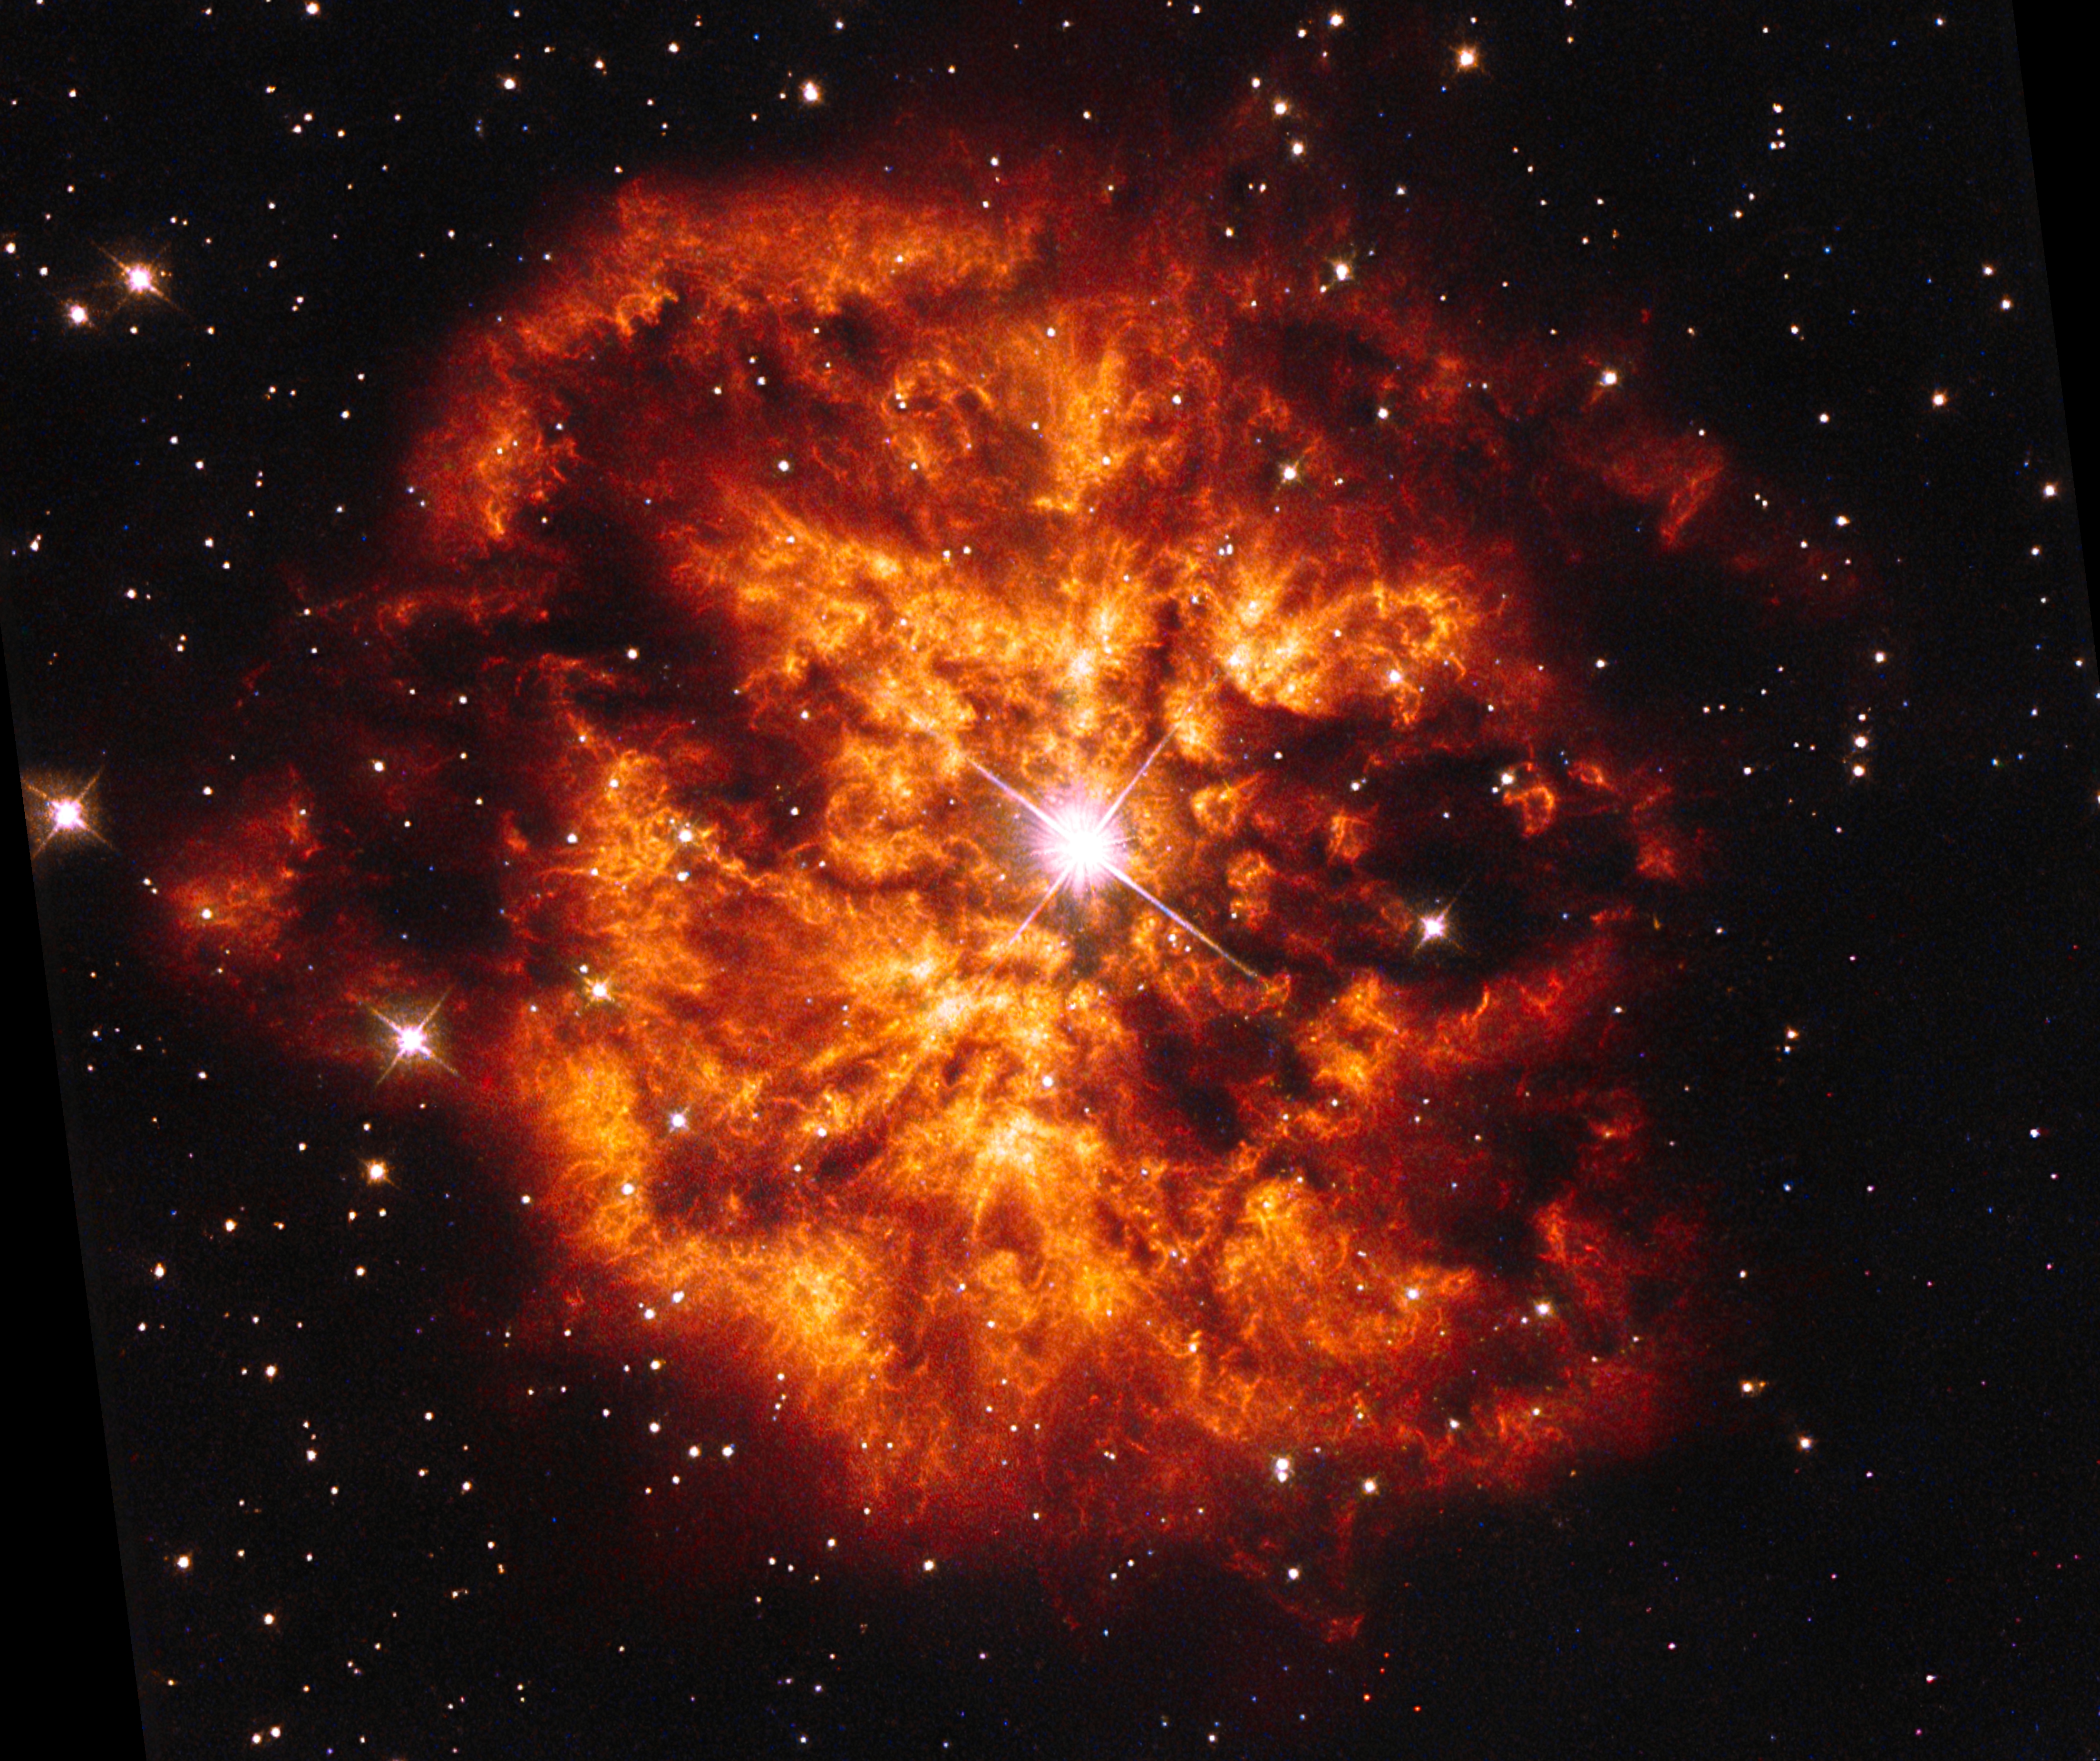

Hubble’s view of Wolf-Rayet 124

This is an optical image from the NASA/ESA Hubble Space Telescope of the luminous, hot star Wolf-Rayet 124 (WR 124).

The image was taken by Hubble’s Wide Field Planetary Camera 2 and was released by ESA/Hubble in 2015. The star shines brightly at the very centre of this explosive image and around the hot clumps of gas are ejected into space at over 150 000 kilometres per hour.

Credit: ESA/Hubble and NASA